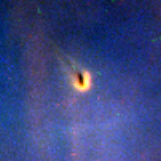

Proplyd in the Orion Nebula

Planet formation is a hazardous process. These four snapshots, taken by NASA/ESA Hubble Space Telescope, show dust disks around embryonic stars in the Orion Nebula being 'blowtorched' by a blistering flood of ultraviolet radiation from the region's brightest star. Within these disks are the seeds of planets. The doomed systems look like hapless comets, with wayward tails of gas boiling off the withering, pancake-shaped disks.

Credit: NASA/ESA, J. Bally (University of Colorado, Boulder, CO), H. Throop (Southwest Research Institute, Boulder, CO), C.R. O'Dell (Vanderbilt University, Nashville, TN)